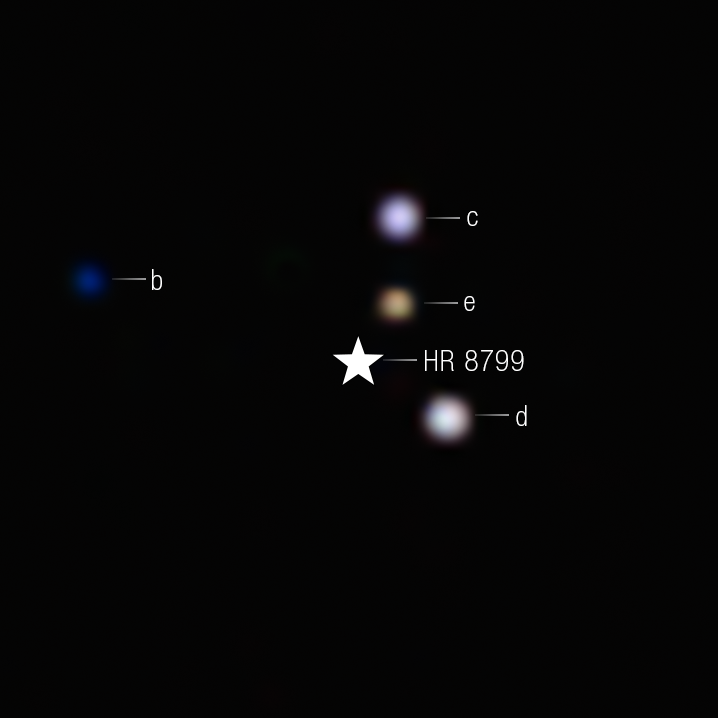

HR 8799 System (NIRCam image)

The NASA/ESA/CSA James Webb Space Telescope has provided the clearest look yet at the iconic multi-planet system HR 8799. The observations detected carbon dioxide in each of the planets, which provides strong evidence that the system’s four giant planets formed much like Jupiter and Saturn, by slowly building solid cores that attract gas from within a protoplanetary disk.

Colours are applied to filters from Webb’s NIRCam (Near-Infrared Camera), revealing their intrinsic differences. A star symbol marks the location of the host star HR 8799, whose light has been blocked by a coronagraph.

The colours in this image, which represent different wavelengths captured by Webb’s NIRCam, tell researchers about the temperatures and composition of the planets. HR 8799 b, which orbits around 10.1 billion kilometres from the star, is the coldest of the bunch, and the richest in carbon dioxide. HR 8799 e orbits 2.4 billion kilometres from its star, and likely formed closer to the host star, where there were stronger variations in the composition of material.

In this image, the colour blue is assigned to 4.1 micron light, green to 4.3 micron light, and red to the 4.6 micron light.

Credit: NASA, ESA, CSA, STScI, W. Balmer (JHU), L. Pueyo (STScI), M. Perrin (STScI)